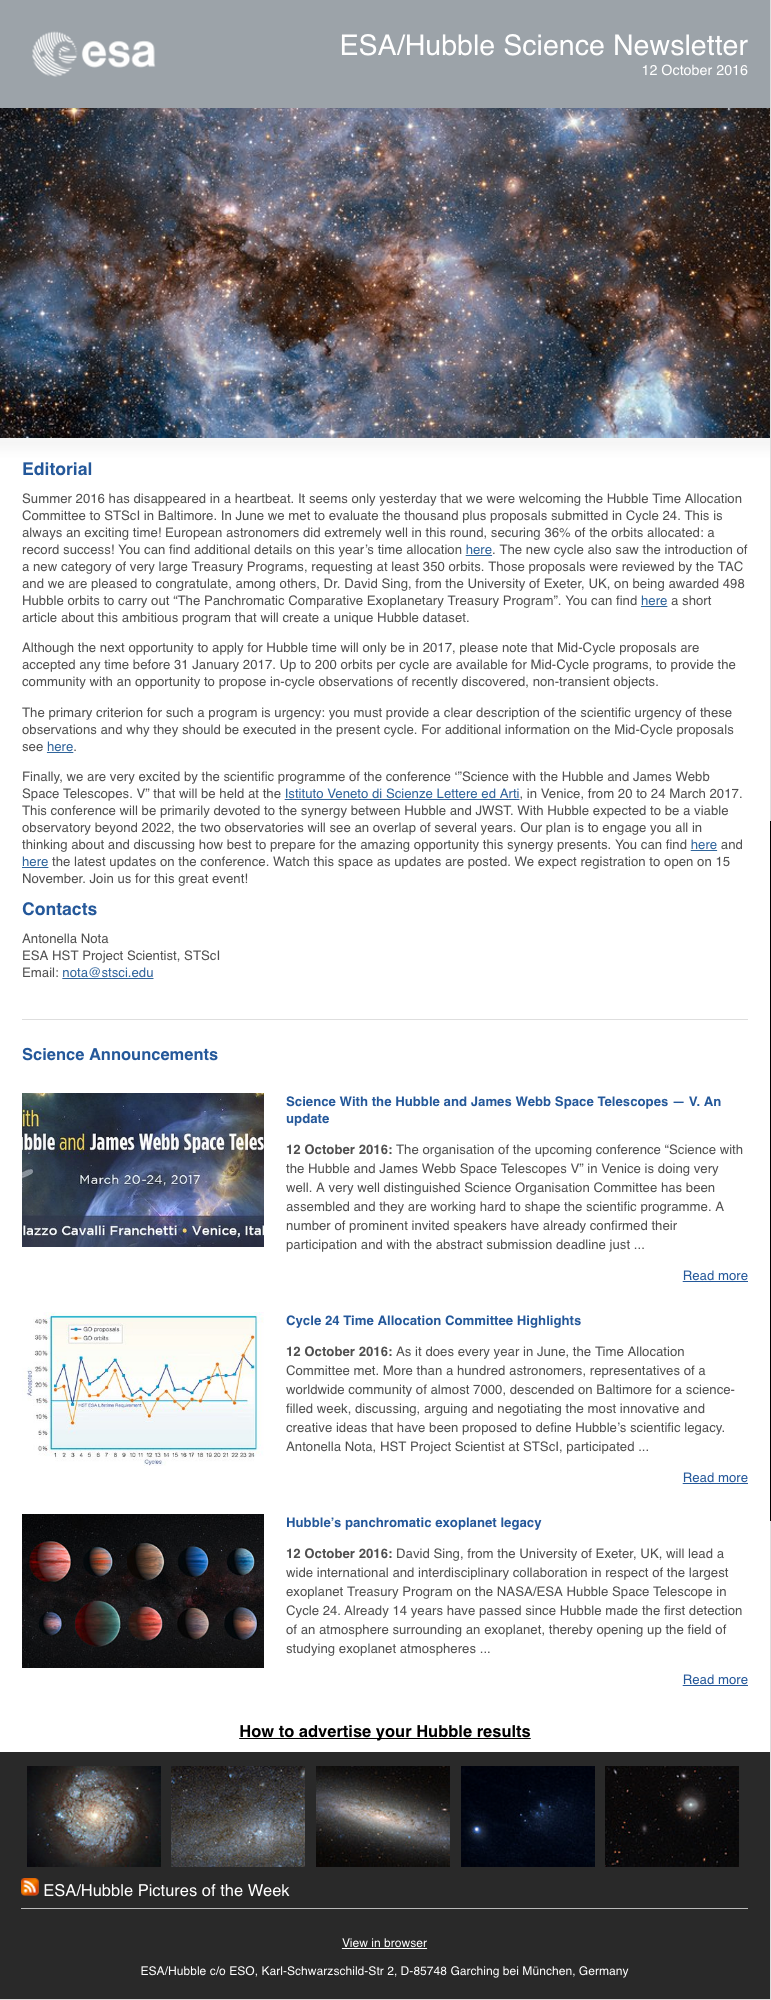

Screenshot of the October issue of ESA/Hubble Science Newsletter

Screenshot of the October issue of ESA/Hubble Science Newsletter.

Credit: NASA & ESA